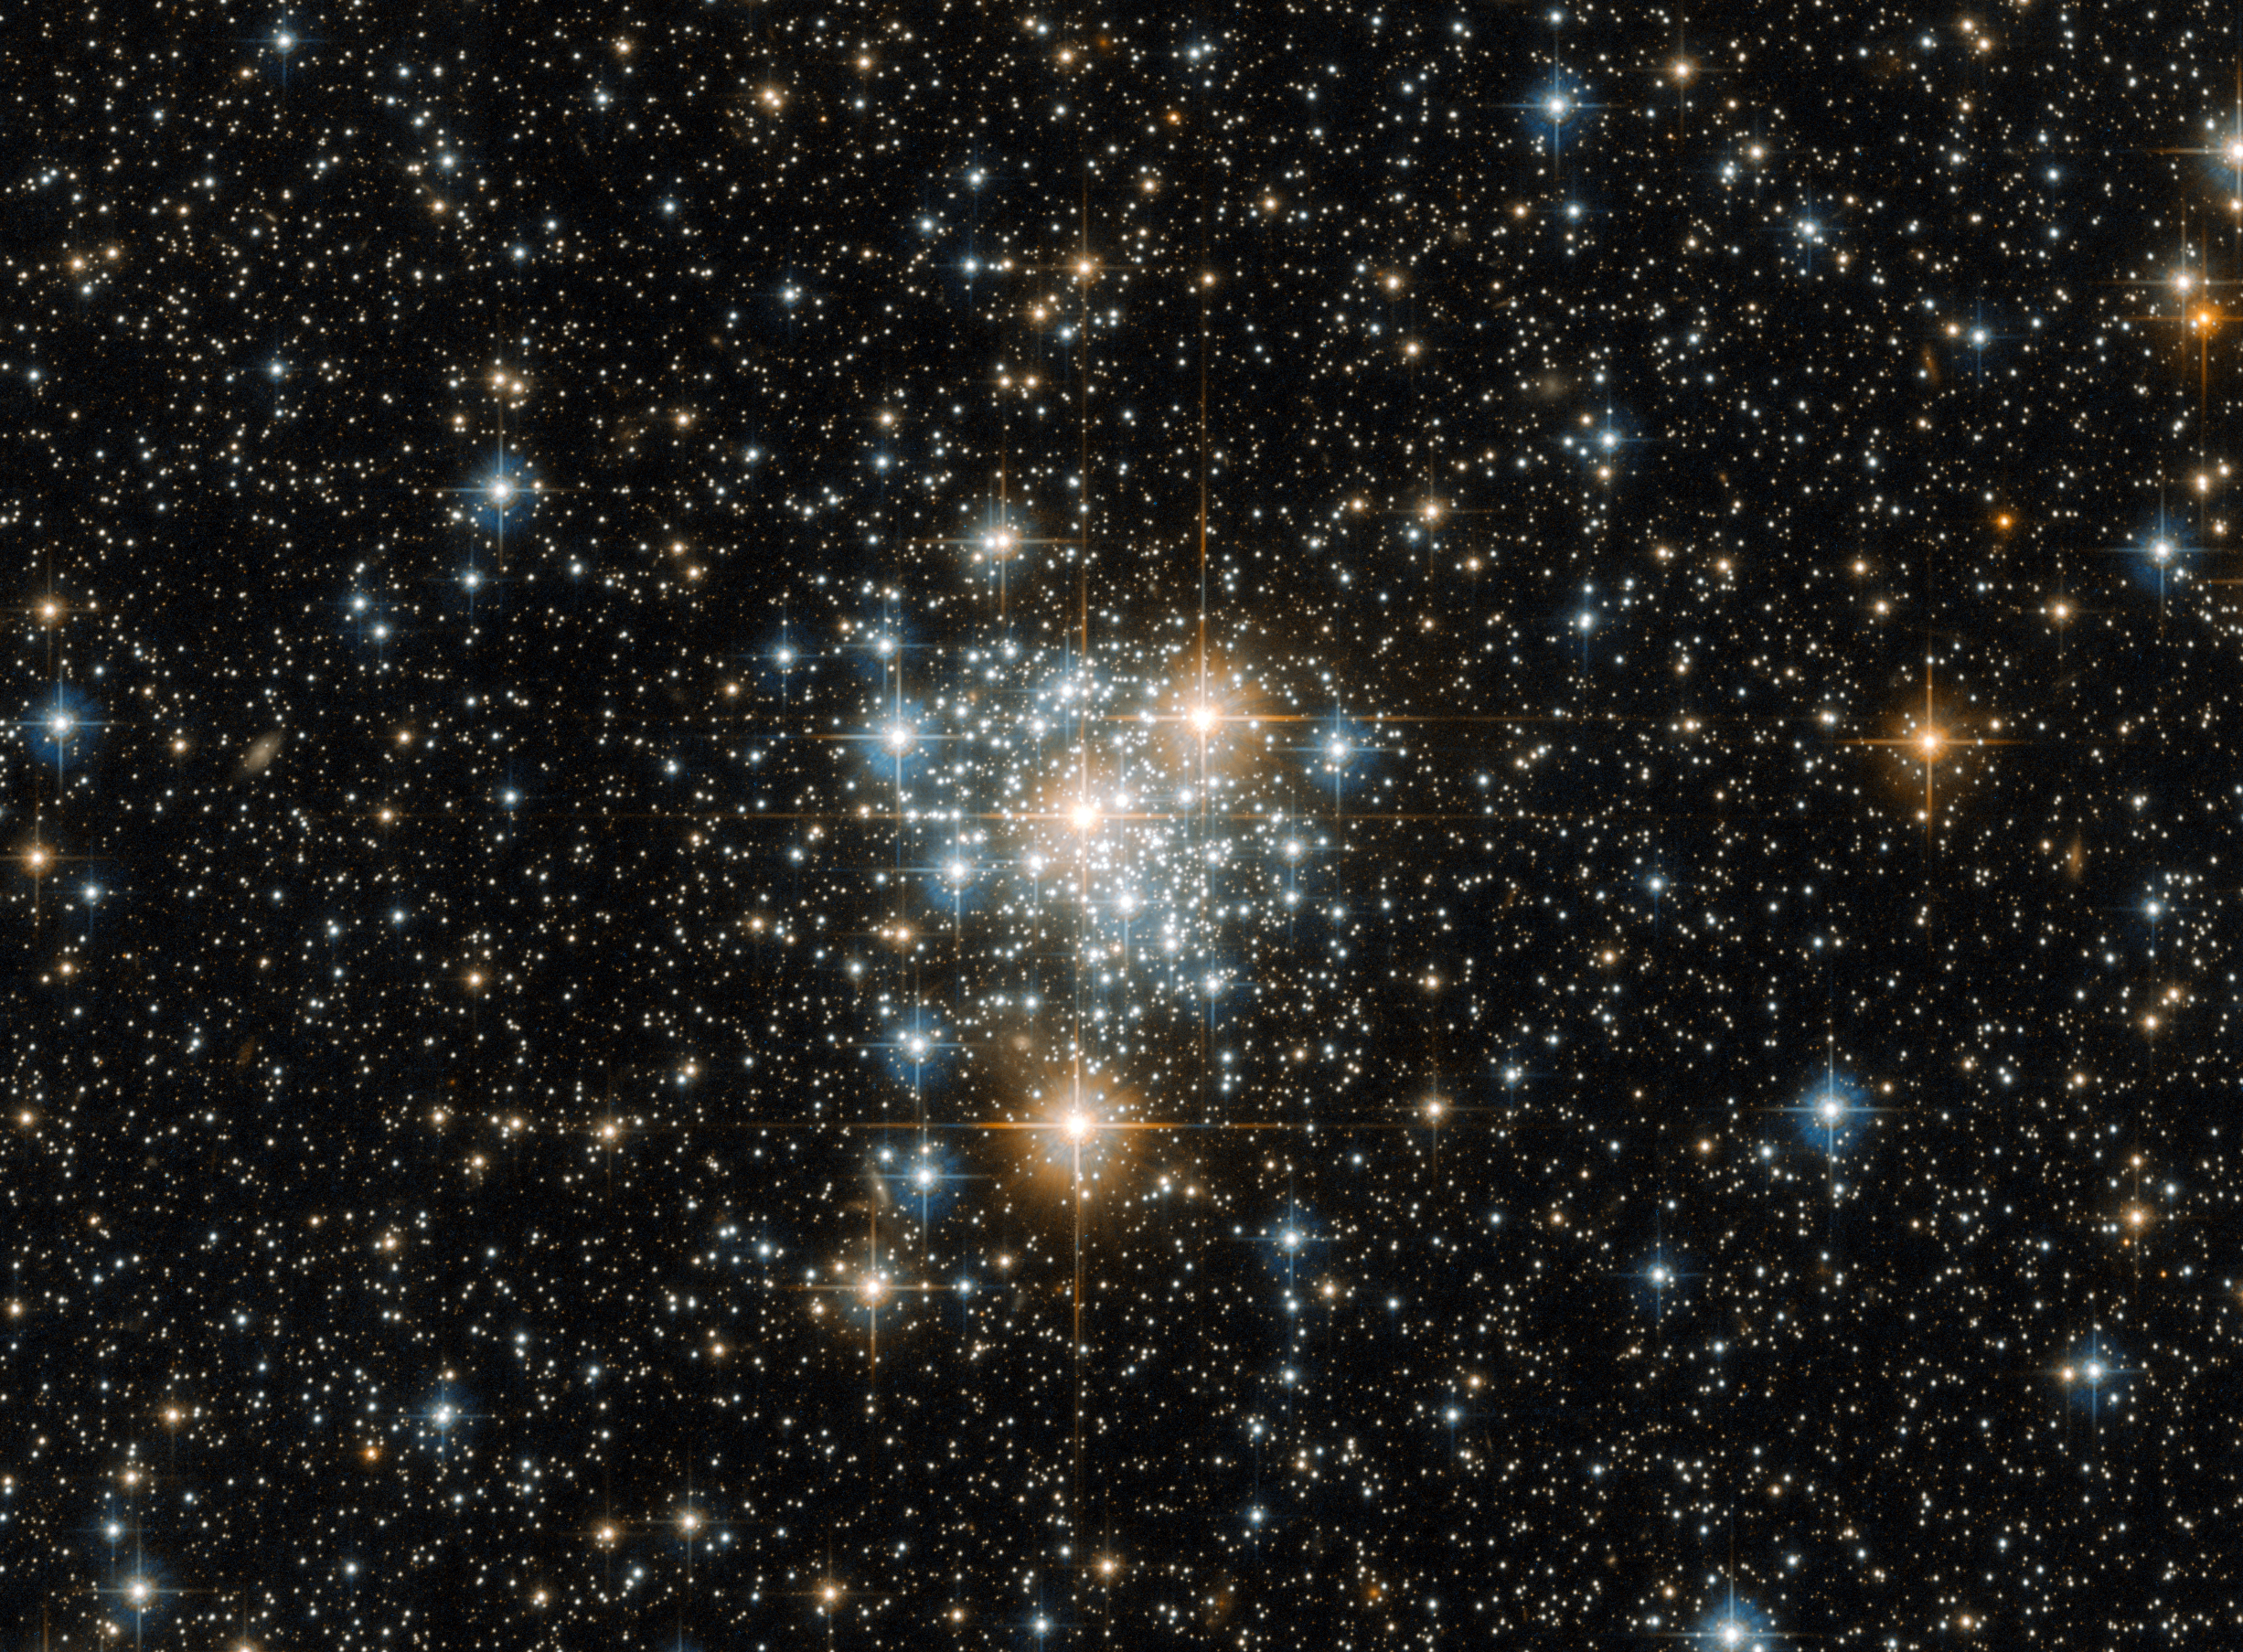

The Toucan and the cluster

It may be famous for hosting spectacular sights such as the Tucana Dwarf Galaxy and 47 Tucanae (heic1510), the second brightest globular cluster in the night sky, but the southern constellation of Tucana (The Toucan) also possesses a variety of unsung cosmic beauties.

One such beauty is NGC 299, an open star cluster located within the Small Magellanic Cloud just under 200 000 light-years away. Open clusters such as this are collections of stars weakly bound by the shackles of gravity, all of which formed from the same massive molecular cloud of gas and dust. Because of this, all the stars have the same age and composition, but vary in their mass because they formed at different positions within the cloud.

This unique property not only ensures a spectacular sight when viewed through a sophisticated instrument attached to a telescope such as Hubble’s Advanced Camera for Surveys, but gives astronomers a cosmic laboratory in which to study the formation and evolution of stars — a process that is thought to depend strongly on a star’s mass.

Credit: ESA/Hubble & NASA